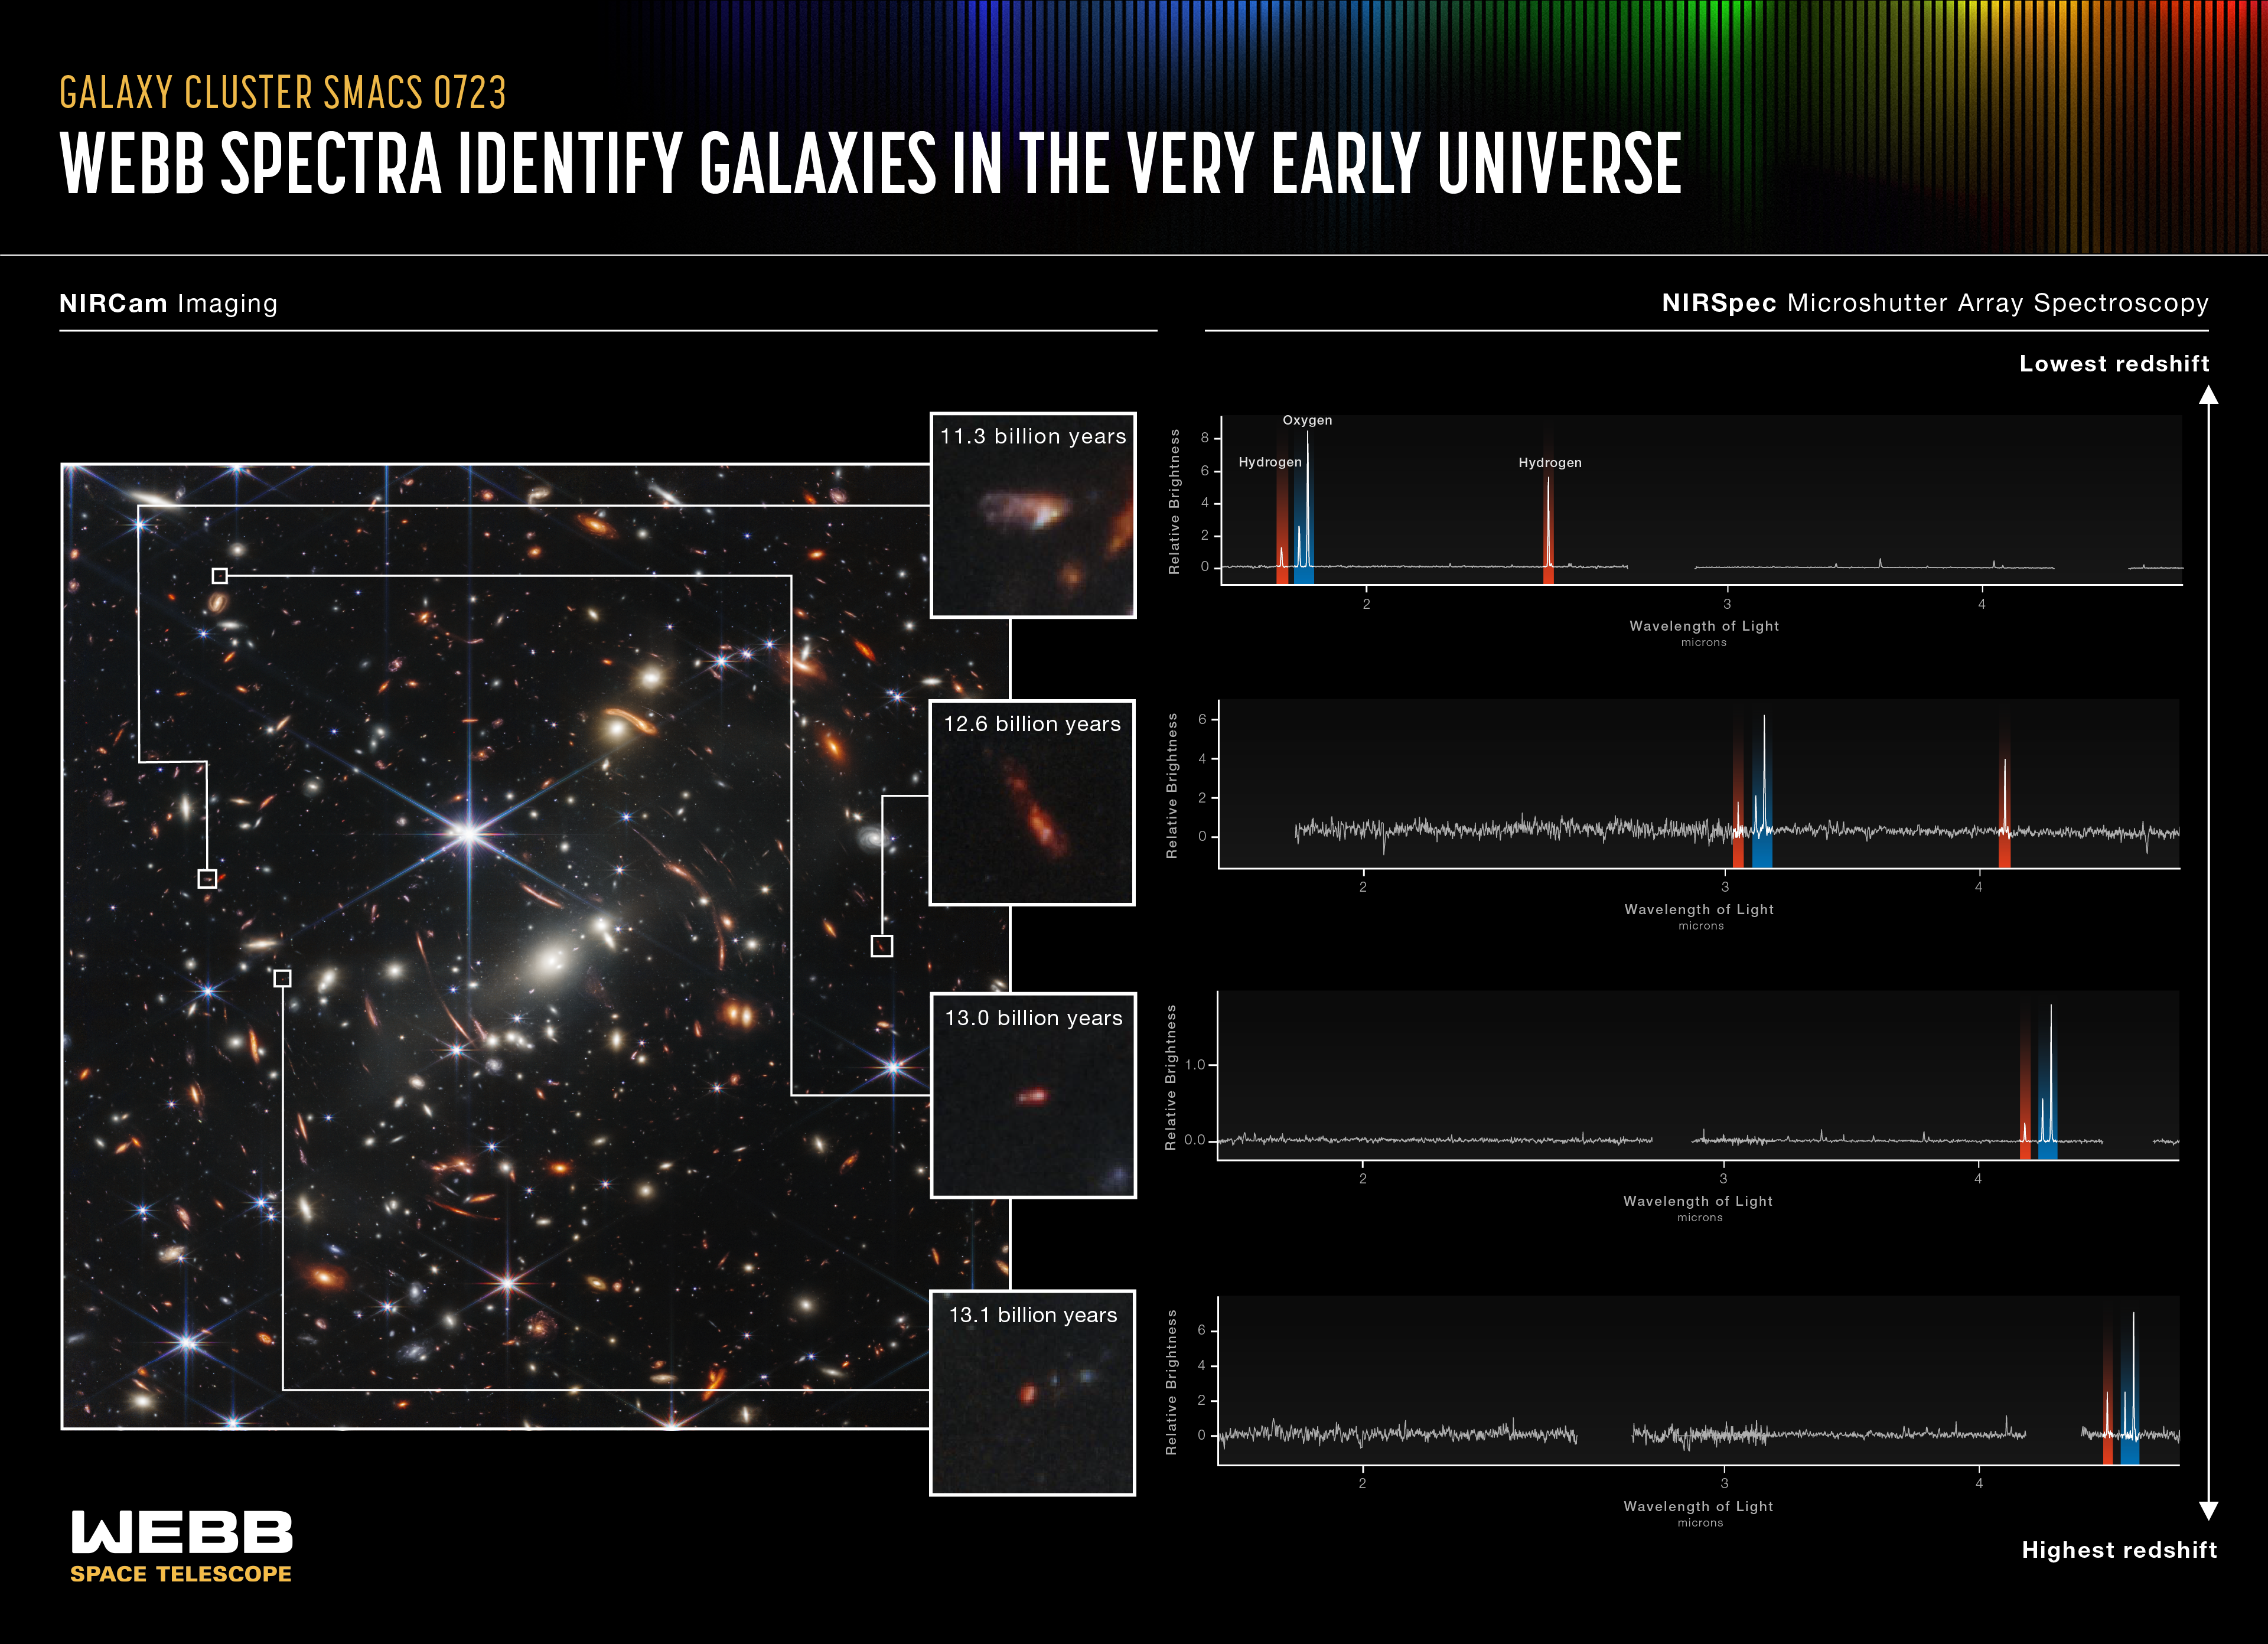

Webb Spectra Identify Galaxies in the Very Early Universe (NIRSpec MSA Emission Spectra)

The NASA/ESA/CSA James Webb Space Telescope has yet another discovery machine aboard – the Near-Infrared Spectrograph’s (NIRSpec’s) microshutter array. This instrument has more than 248,000 tiny doors that can be individually opened to gather spectra (light) of up to approximately 150 individual objects simultaneously.

Of the thousands of distant galaxies behind galaxy cluster SMACS 0723, NIRSpec observed 48 individually – all at the same time – in a field that is approximately the size of a grain of sand held at arm’s length. Quick analysis made it immediately clear that several of these galaxies were observed as they existed at very early periods in the history of the universe, which is estimated to be 13.8 billion years old.

Look for the same feature highlighted in each spectrum. Three lines appear in the same order every time – one hydrogen line followed by two ionised oxygen lines. Where this pattern falls on each spectrum tells researchers the redshift of individual galaxies, revealing how long ago their light was emitted.

Light from the farthest galaxy shown travelled 13.1 billion years before Webb’s mirrors captured it. These observations mark the first time these particular emission lines have been seen at such immense distances – and these are only Webb’s initial observations. There may be even more distant galaxies in this image!

In these spectra, Webb has also shown us the chemical composition of galaxies in the very early universe for the first time. This was made possible by the telescope’s position in space – far away from Earth’s atmosphere, which filters out some infrared light – and its specialisation in gathering high-resolution near-infrared light.

And since similar spectra from galaxies at closer distances have long been studied by other space- and ground-based observatories, astronomers already know a lot about the properties of nearby galaxies. Now, astronomers will be able to study and compare spectra from Webb to determine how galaxies have changed over billions of years, dating back to the early universe.

With Webb’s data, researchers can now measure each galaxy’s distance, temperature, gas density, and chemical composition. We will soon learn an incredible amount about galaxies that existed all across cosmic time!

For a full array of Webb’s first images and spectra, including downloadable files, please visit: https://esawebb.org/initiatives/webbs-first-images/

NIRSpec was built for the European Space Agency (ESA) by a consortium of European companies led by Airbus Defence and Space (ADS) with NASA’s Goddard Space Flight Center providing its detector and micro-shutter subsystems.

Credit: NASA, ESA, CSA, and STScI